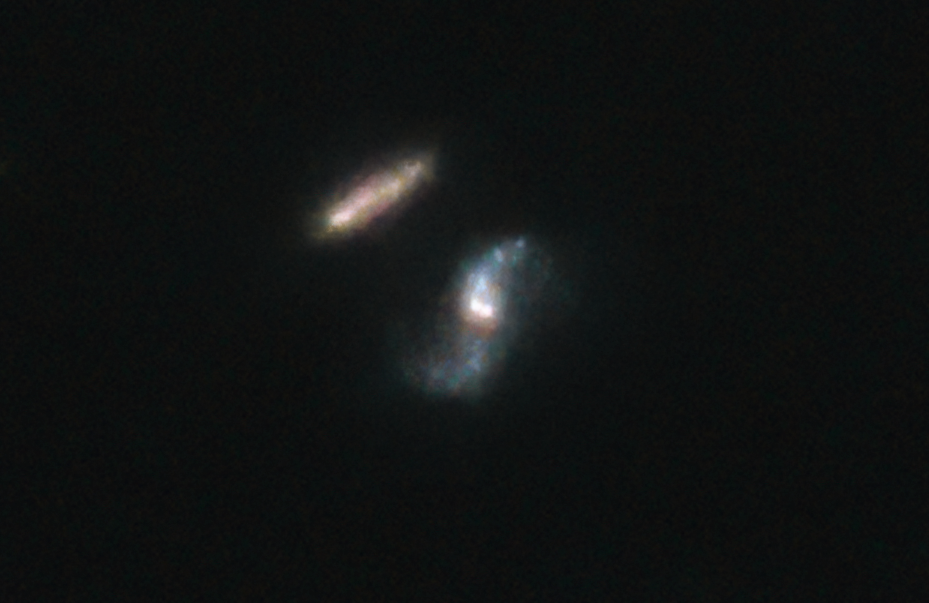

Hubble Observation of the host galaxy of GRB 190114C

This image shows a recent observation made by the NASA/ESA Hubble Space Telescope of GRB 190114C.

Credit: NASA, ESA, A. de Ugarte Postigo and A. J. Levan